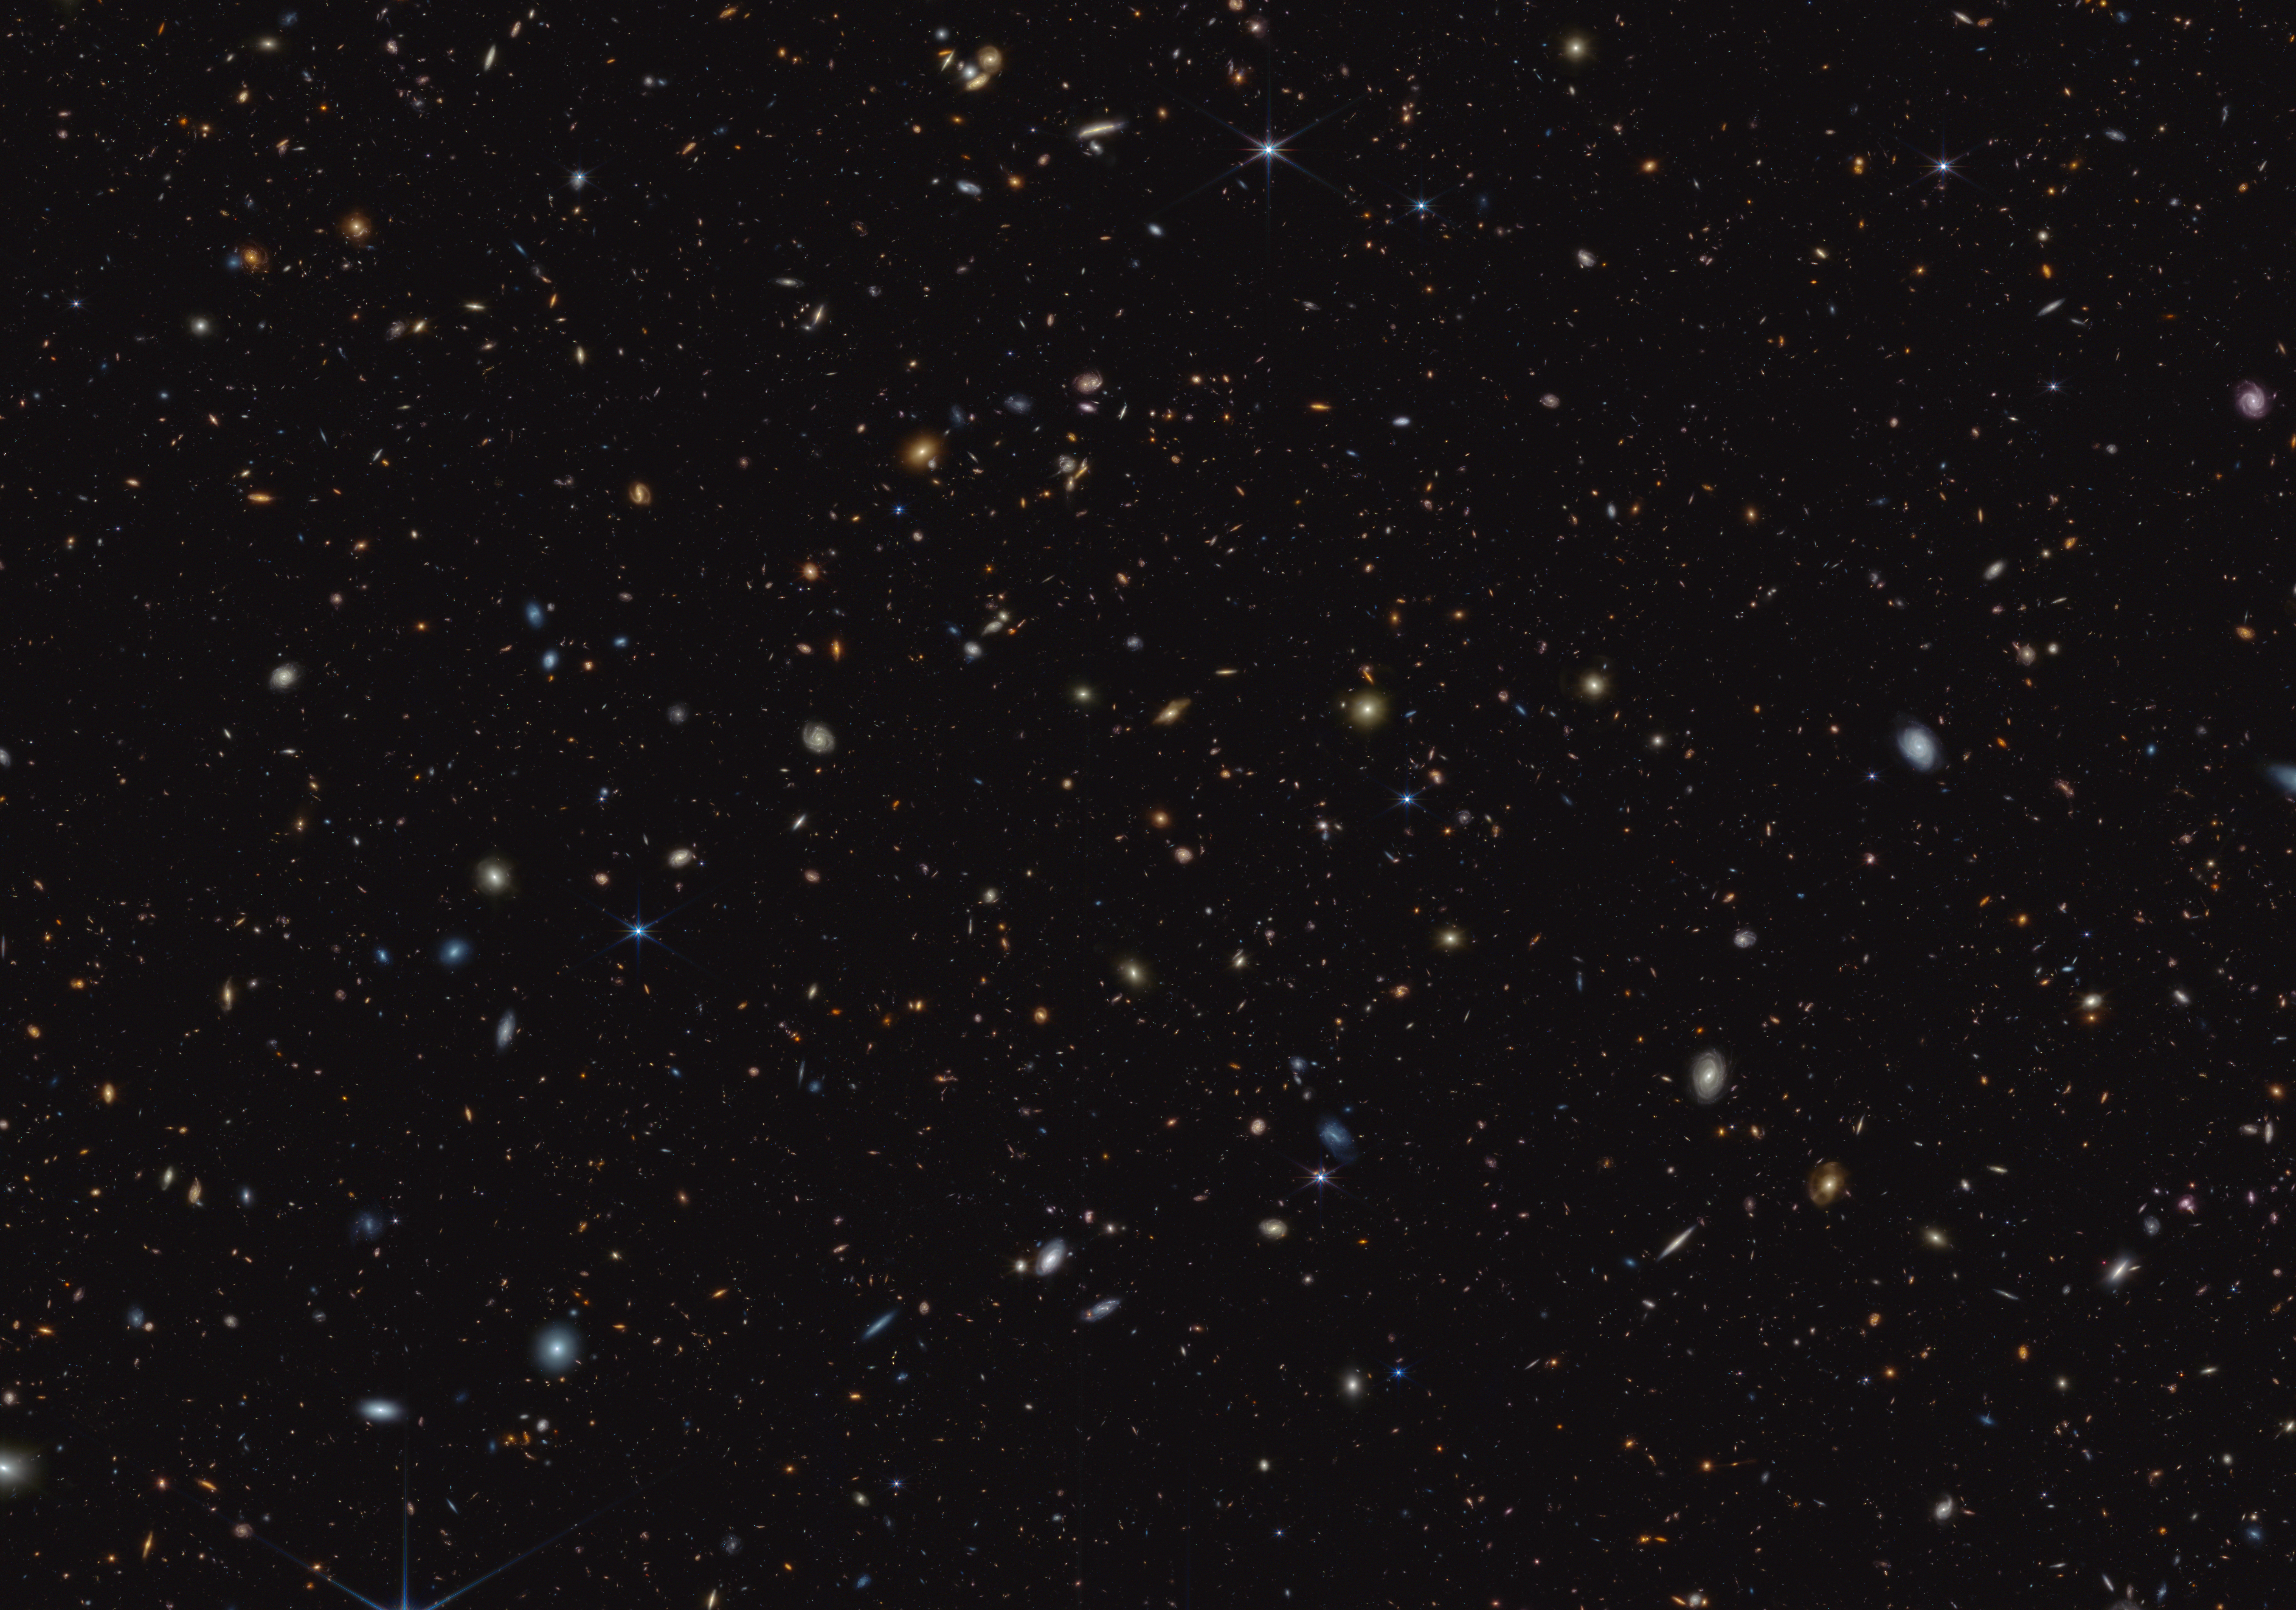

GOODS-S field (NIRCam image)

How did the first stars and galaxies form? The NASA/ESA/CSA James Webb Space Telescope is already providing new insights into this question. One of the largest programs in Webb’s first year of science is the JWST Advanced Deep Extragalactic Survey, or JADES, which will devote about 32 days of telescope time to uncover and characterize faint, distant galaxies. While the data are still coming in, JADES already has discovered hundreds of galaxies that existed when the Universe was less than 600 million years old. The team also has identified galaxies sparkling with a multitude of young, hot stars.

This infrared image shows a portion of an area of the sky known as GOODS-South, which has been well studied by the NASA/ESA Hubble Space Telescope and other observatories. More than 45,000 galaxies are visible here.

Using these and other data, the JADES team has discovered hundreds of galaxies that existed when the Universe was less than 600 million years old. The sheer number of these galaxies was far beyond predictions from observations made before Webb’s launch. The team also has identified galaxies that existed during a time known as the Epoch of Reionization, when the Universe underwent a transformation from opaque to transparent. Many of these galaxies shown unusually strong emission line signatures due to the creation of multitudes of hot, massive stars.

In this image, blue, green, and red were assigned to Webb’s NIRCam (Near-Infrared Camera) data at 0.9, 1.15, and 1.5 microns; 2.0, 2.77, and 3.55 microns; and 3.56, 4.1, and 4.44 microns (F090W, F115W, and F150W; F200W, F277W, and F335M; and F356W, F410M, and F444W), respectively.

Credit: NASA, ESA, CSA, B. Robertson (UC Santa Cruz), B. Johnson (Center for Astrophysics, Harvard & Smithsonian), S. Tacchella (University of Cambridge, M. Rieke (Univ. of Arizona), D. Eisenstein (Center for Astrophysics, Harvard & Smithsonian), A. Pagan (STScI)